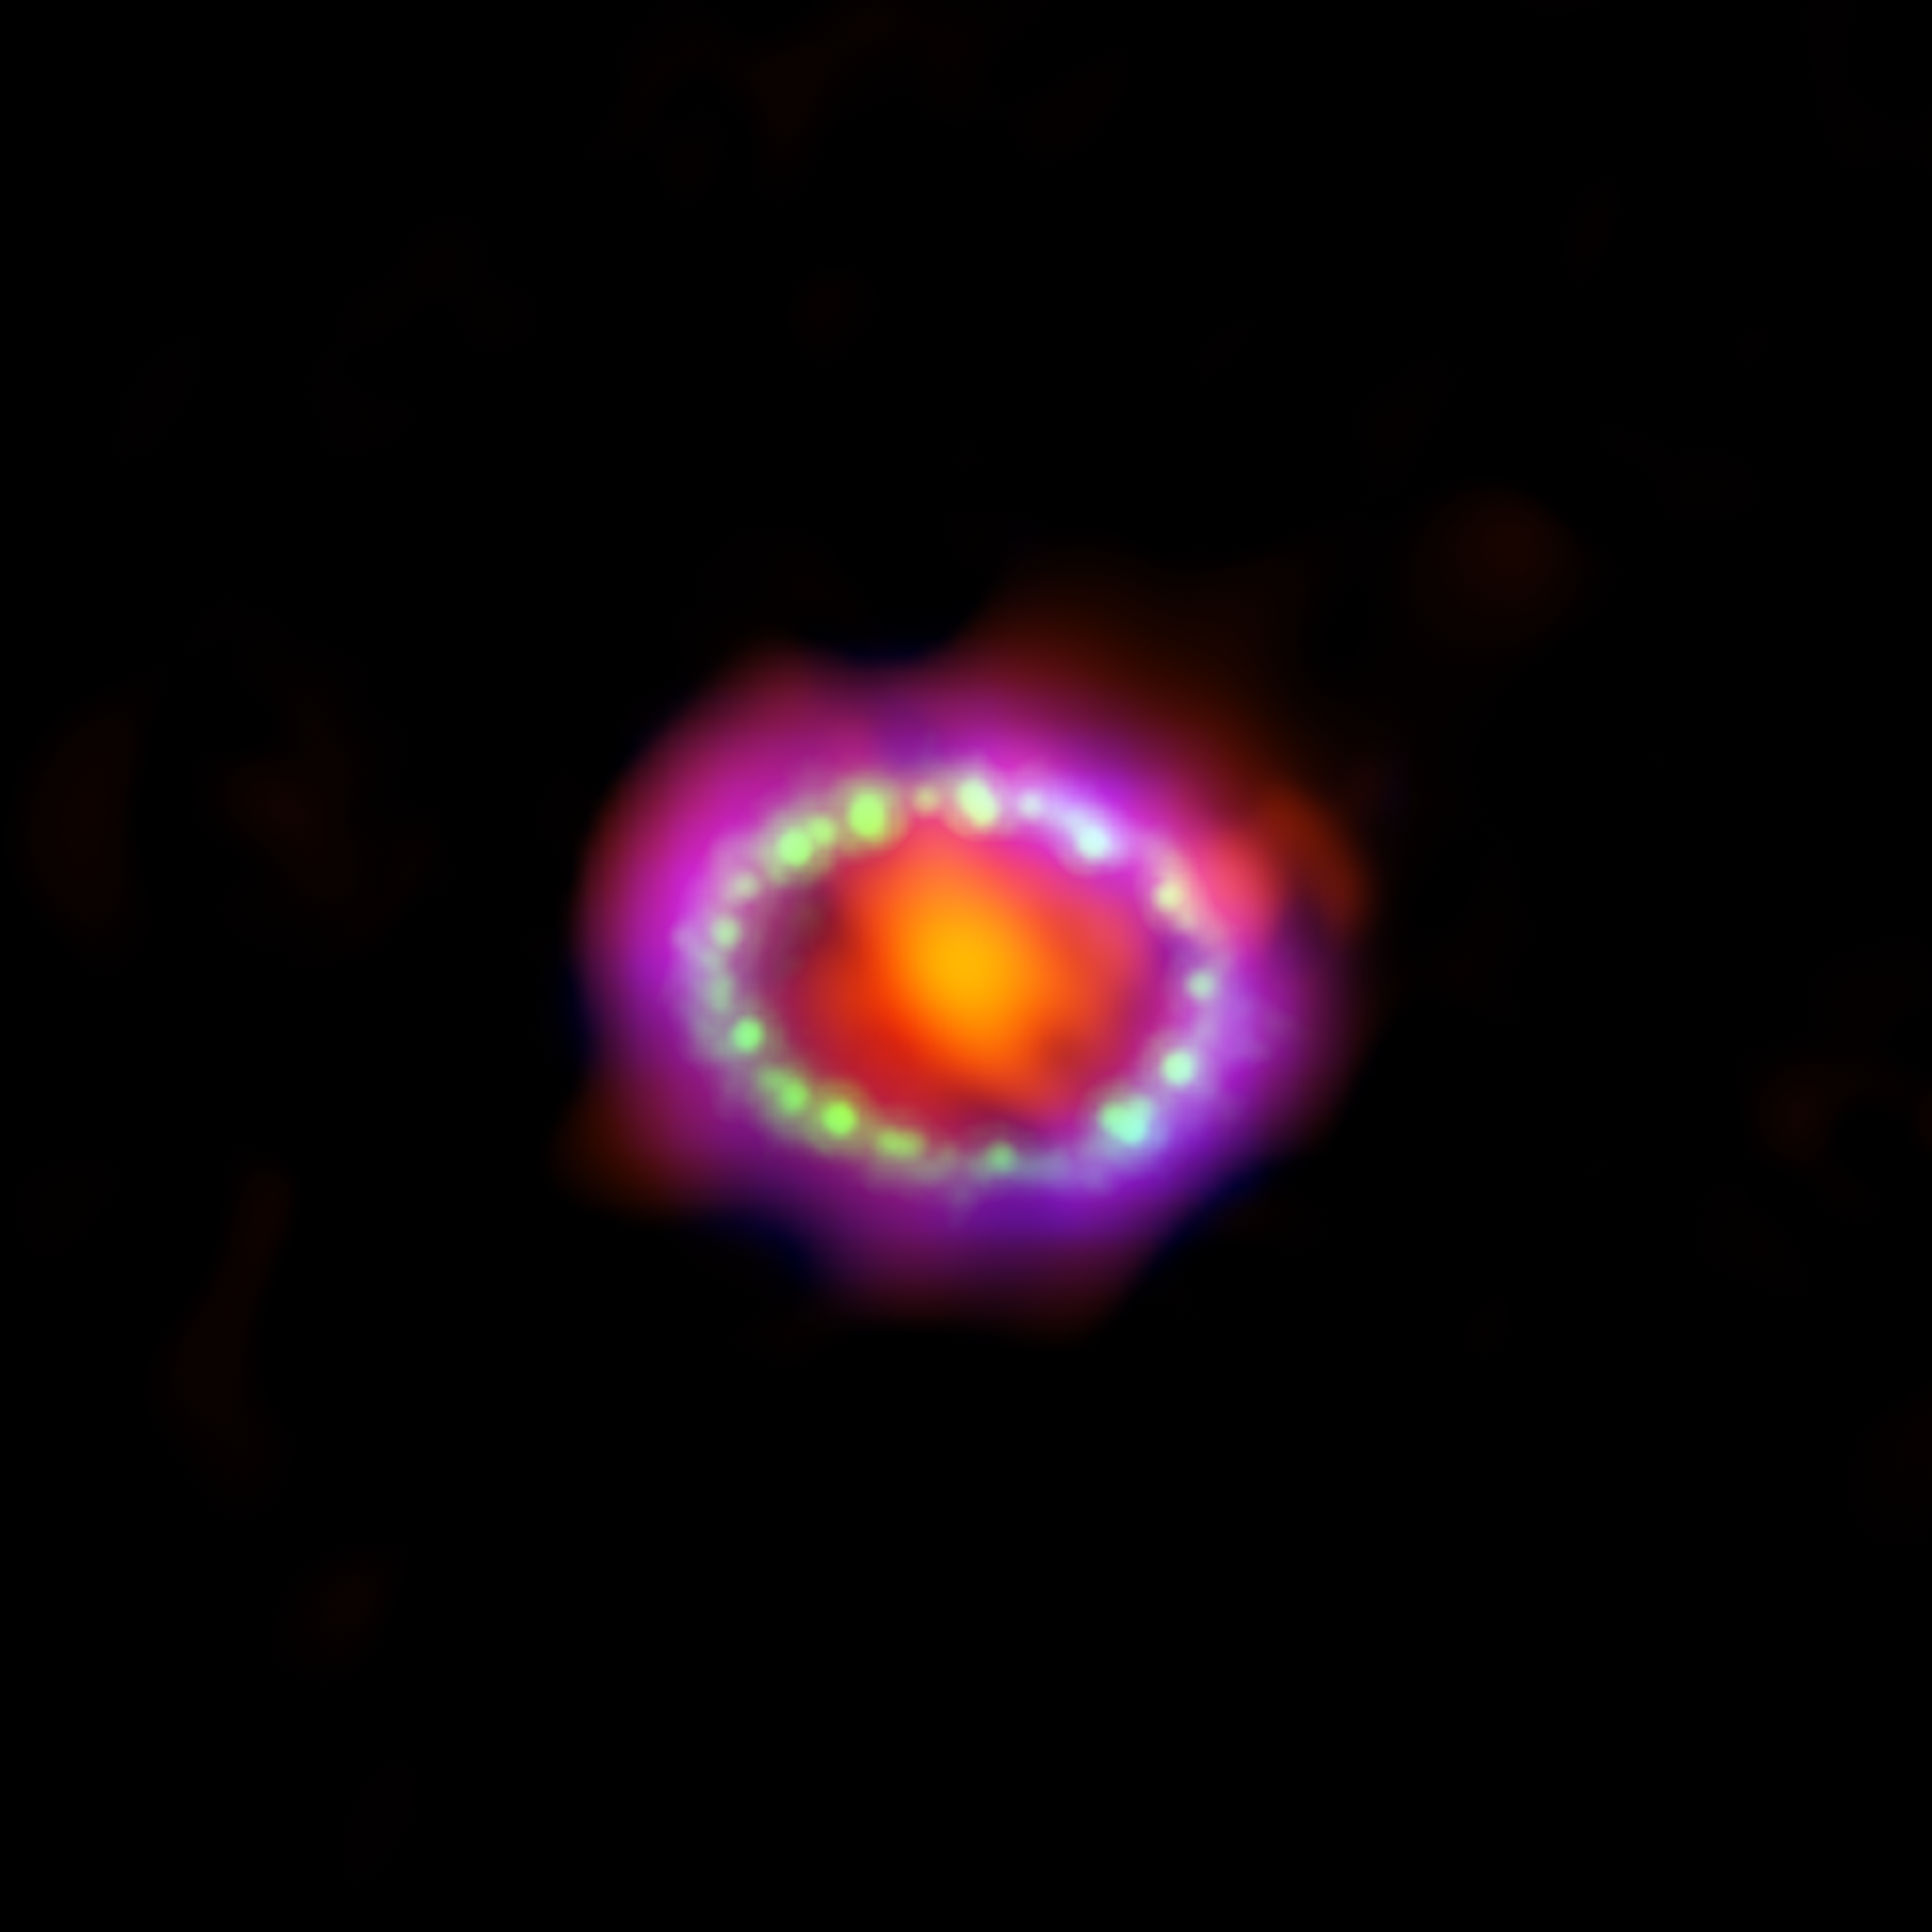

Composite image of supernova 1987A

Astronomers combined observations from three different observatoriesto produce this multiwavelength image of the remnants of SN 1987A.

The red colour shows newly formed dust in the centre of the supernova remnant, taken at submillimeter wavelengths by the Atacama Large Millimeter/submillimeter Array (ALMA) telescope in Chile. The green represents the glow of visible light, captured by the NASA/ESA Hubble Space Telescope. The blue color reveals the hottest gas and is based on data from NASA’s Chandra X-Ray observatory. The green and blue hues reveal where the expanding shock wave from the explosion is colliding with a ring of material around the supernova.

This ring was initially illuminated by the ultraviolet flash from the explosion, but over the past few years the ring material has brightened considerably as it collides with the expanding shock wave.

Credit: ALMA: ESO/NAOJ/NRAO/A. Angelich Hubble: NASA, ESA, R. Kirshner (Harvard-Smithsonian Center for Astrophysics and Gordon and Betty Moore Foundation) and P. Challis (Harvard-Smithsonian Center for Astrophysics) Chandra: NASA/CXC/Penn State/K. Frank et al.